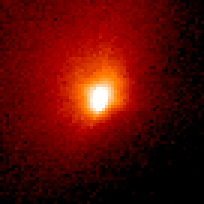

Comet Hale-Bopp

This is a series of Hubble Space Telescope observations of the region around the nucleus of Hale-Bopp, taken on eight different dates since September 1995. They chronicle changes in the evolution of the nucleus as it moves ever closer to, and is warmed by, the sun.

Credit: Harold Weaver (Johns Hopkins University) and NASA/ESA